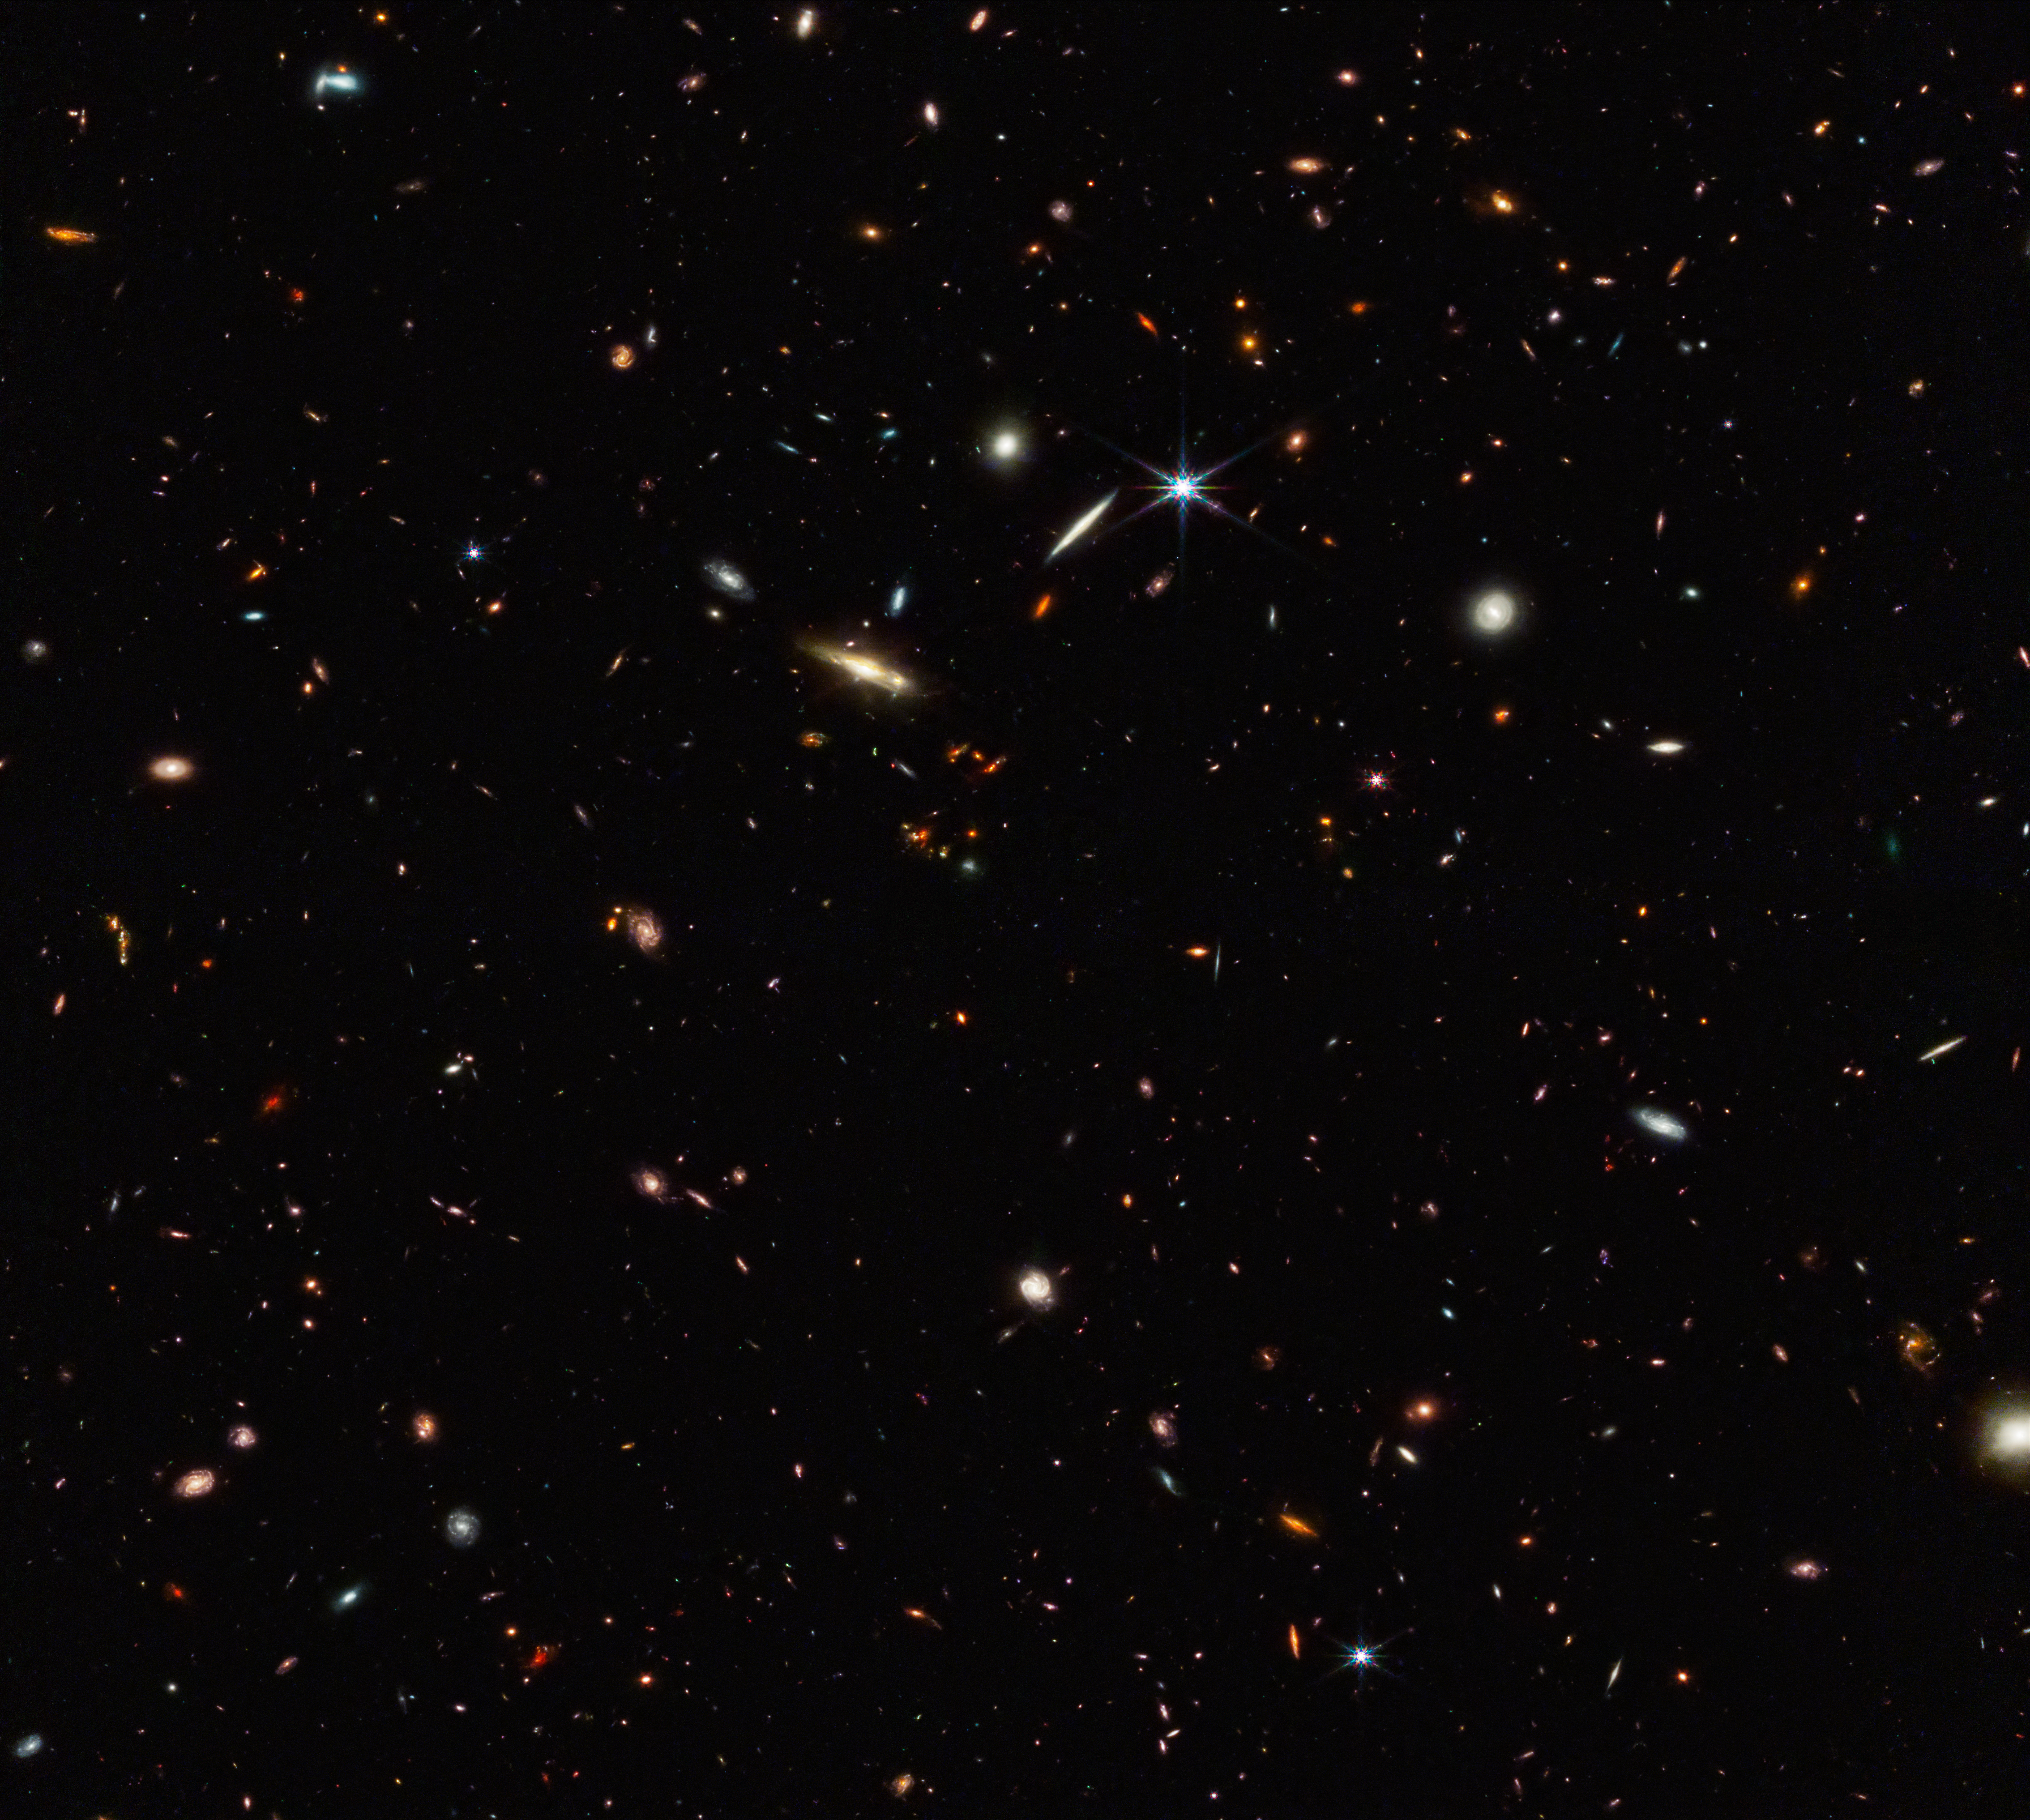

Webb identifies the earliest strands of the cosmic web (clean)

Galaxies are not scattered randomly across the universe. They gather together not only into clusters, but into vast interconnected filamentary structures with gigantic barren voids in between. This “cosmic web” started out tenuous and became more distinct over time as gravity drew matter together.

Astronomers for the ASPIRE program using the NASA/ESA/CSA James Webb Space Telescope have discovered a thread-like arrangement of 10 galaxies that existed just 830 million years after the Big Bang. This deep galaxy field from Webb’s NIRCam (Near-Infrared Camera) hosts these 10 distant galaxies. This 3 million light-year-long filament is anchored by a very distant and luminous quasar – a galaxy with an active, supermassive black hole at its core. The quasar, called J0305-3150, on the right side of the image, outshines its host galaxy. These 10 galaxies existed just 830 million years after the big bang. The team believes the filament will eventually evolve into a massive cluster of galaxies.

These results were published in two papers in The Astrophysical Journal Letters on 29 June 2023.

Credit: NASA, ESA, CSA, F. Wang (University of Arizona)